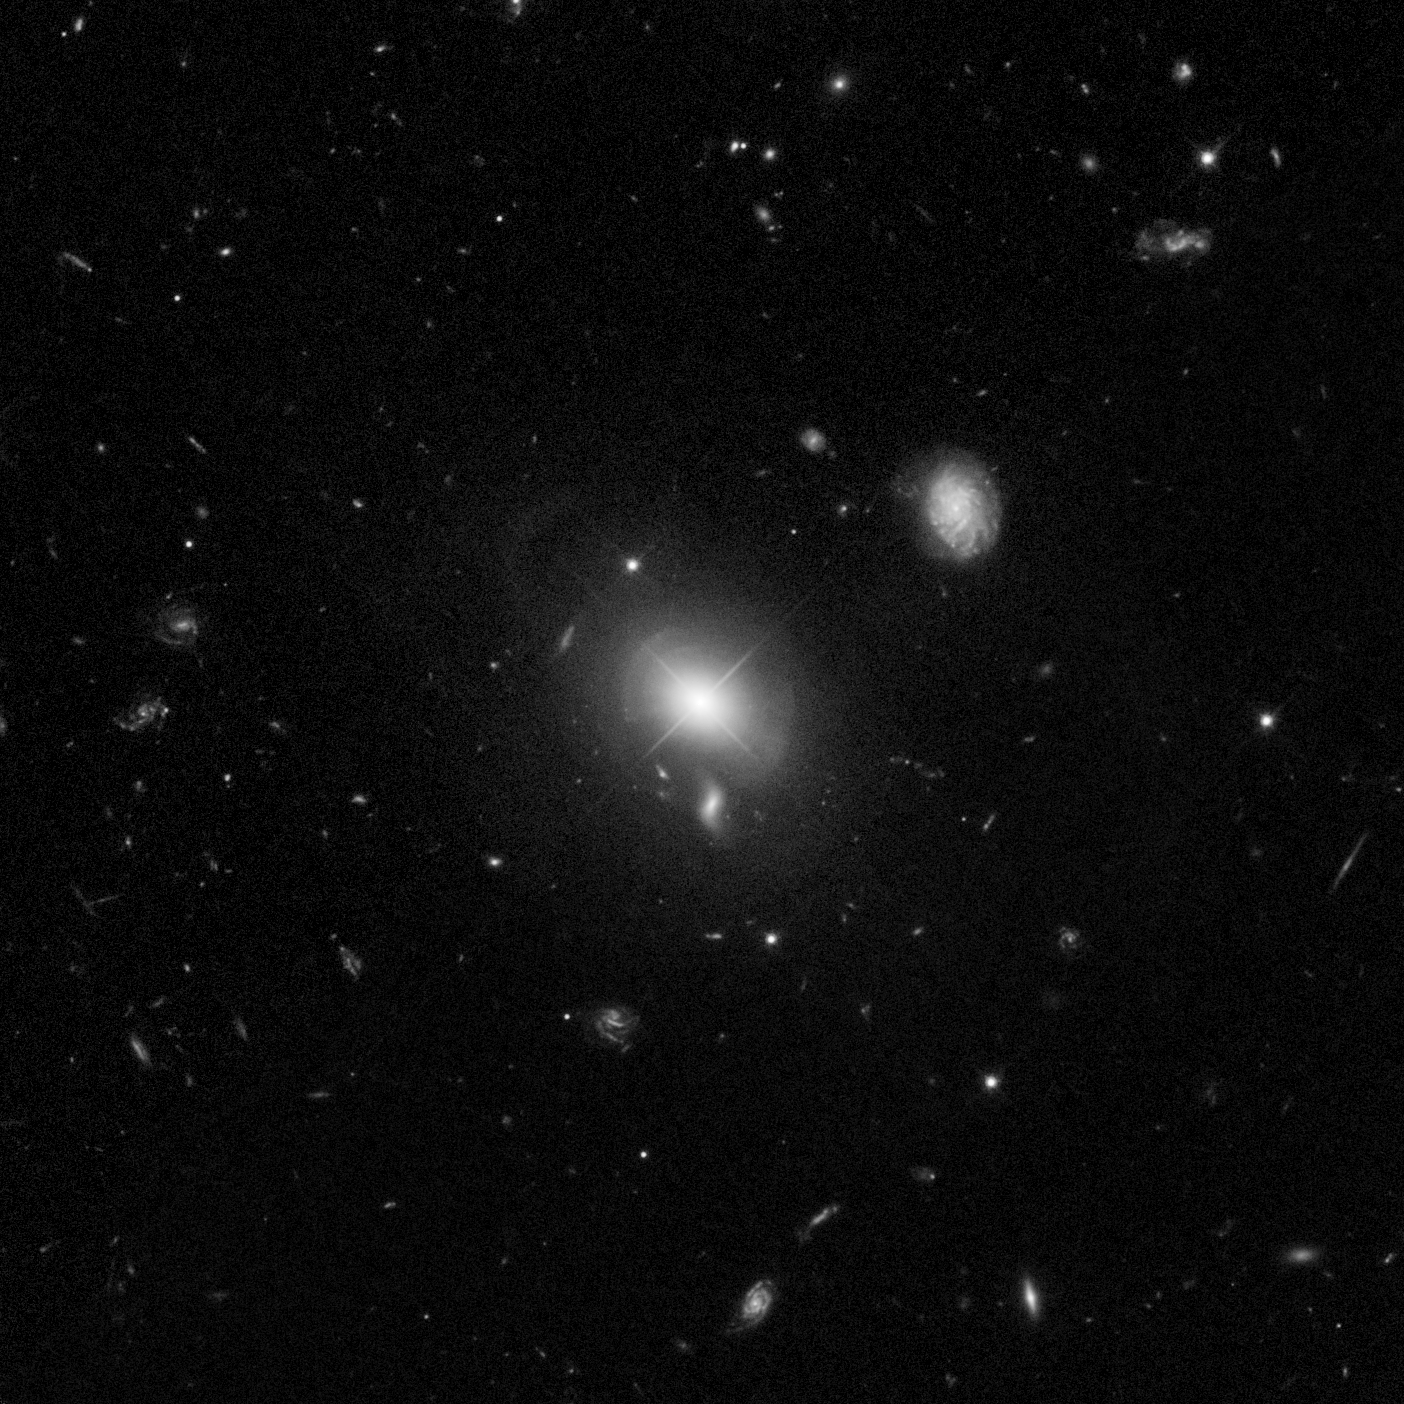

Quasar MC2 1635+119 and host galaxy

This image taken by Hubble shows the host galaxy of the quasar MC2 1635+119. The quasar sits in an indisturbed elliptical galaxy which shows a shell structure indicating a recent merger. An intermediate population of stars is dominating the galaxy and probably the result of a strong star burst at the time of the merging process.

Credit: NASA, ESA, and G. Canalizo (University of California, Riverside)